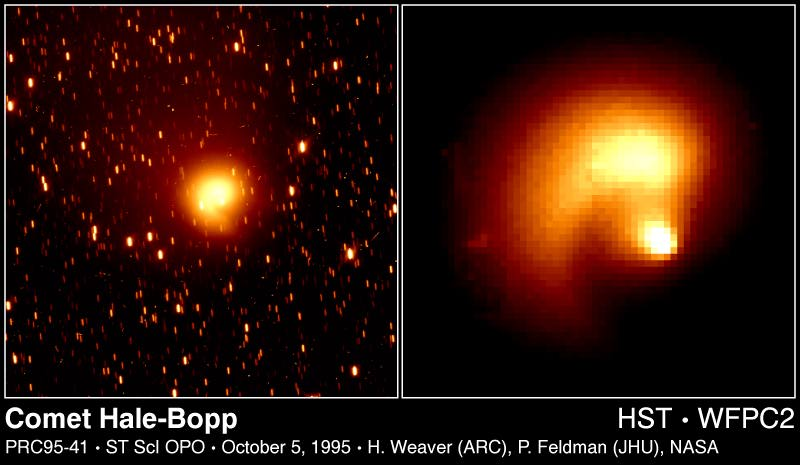

Comet Hale-Bopp

These Hubble Space Telescope pictures of comet Hale-Bopp show a remarkable 'pinwheel' pattern and a blob of free-flying debris near the nucleus. The bright clump of light along the spiral (above the nucleus, which is near the center of the frame) may be a piece of the comet's icy crust that was ejected into space by a combination of ice evaporation and the comet's rotation, and which then disintegrated into a bright cloud of particles.

Credit: H.A. Weaver (Applied Research Corp.), P.D. Feldman (The Johns Hopkins University), and NASA/ESA